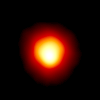

The Atmosphere of Betelgeuse

This is the first direct image of a star other than the Sun, made with the Hubble Space Telescope. Called Alpha Orionis, or Betelgeuse, it is a red supergiant star marking the shoulder of the winter constellation Orion the Hunter.

The Hubble image reveals a huge ultraviolet atmosphere with a mysterious hot spot on the stellar behemoth's surface. The enormous bright spot, which is many hundreds times the diameter of Sun, is at least 2, 000 Kelvin degrees hotter than the surface of the star.

Credit: Andrea Dupree (Harvard-Smithsonian CfA), Ronald Gilliland (STScI), NASA and ESA